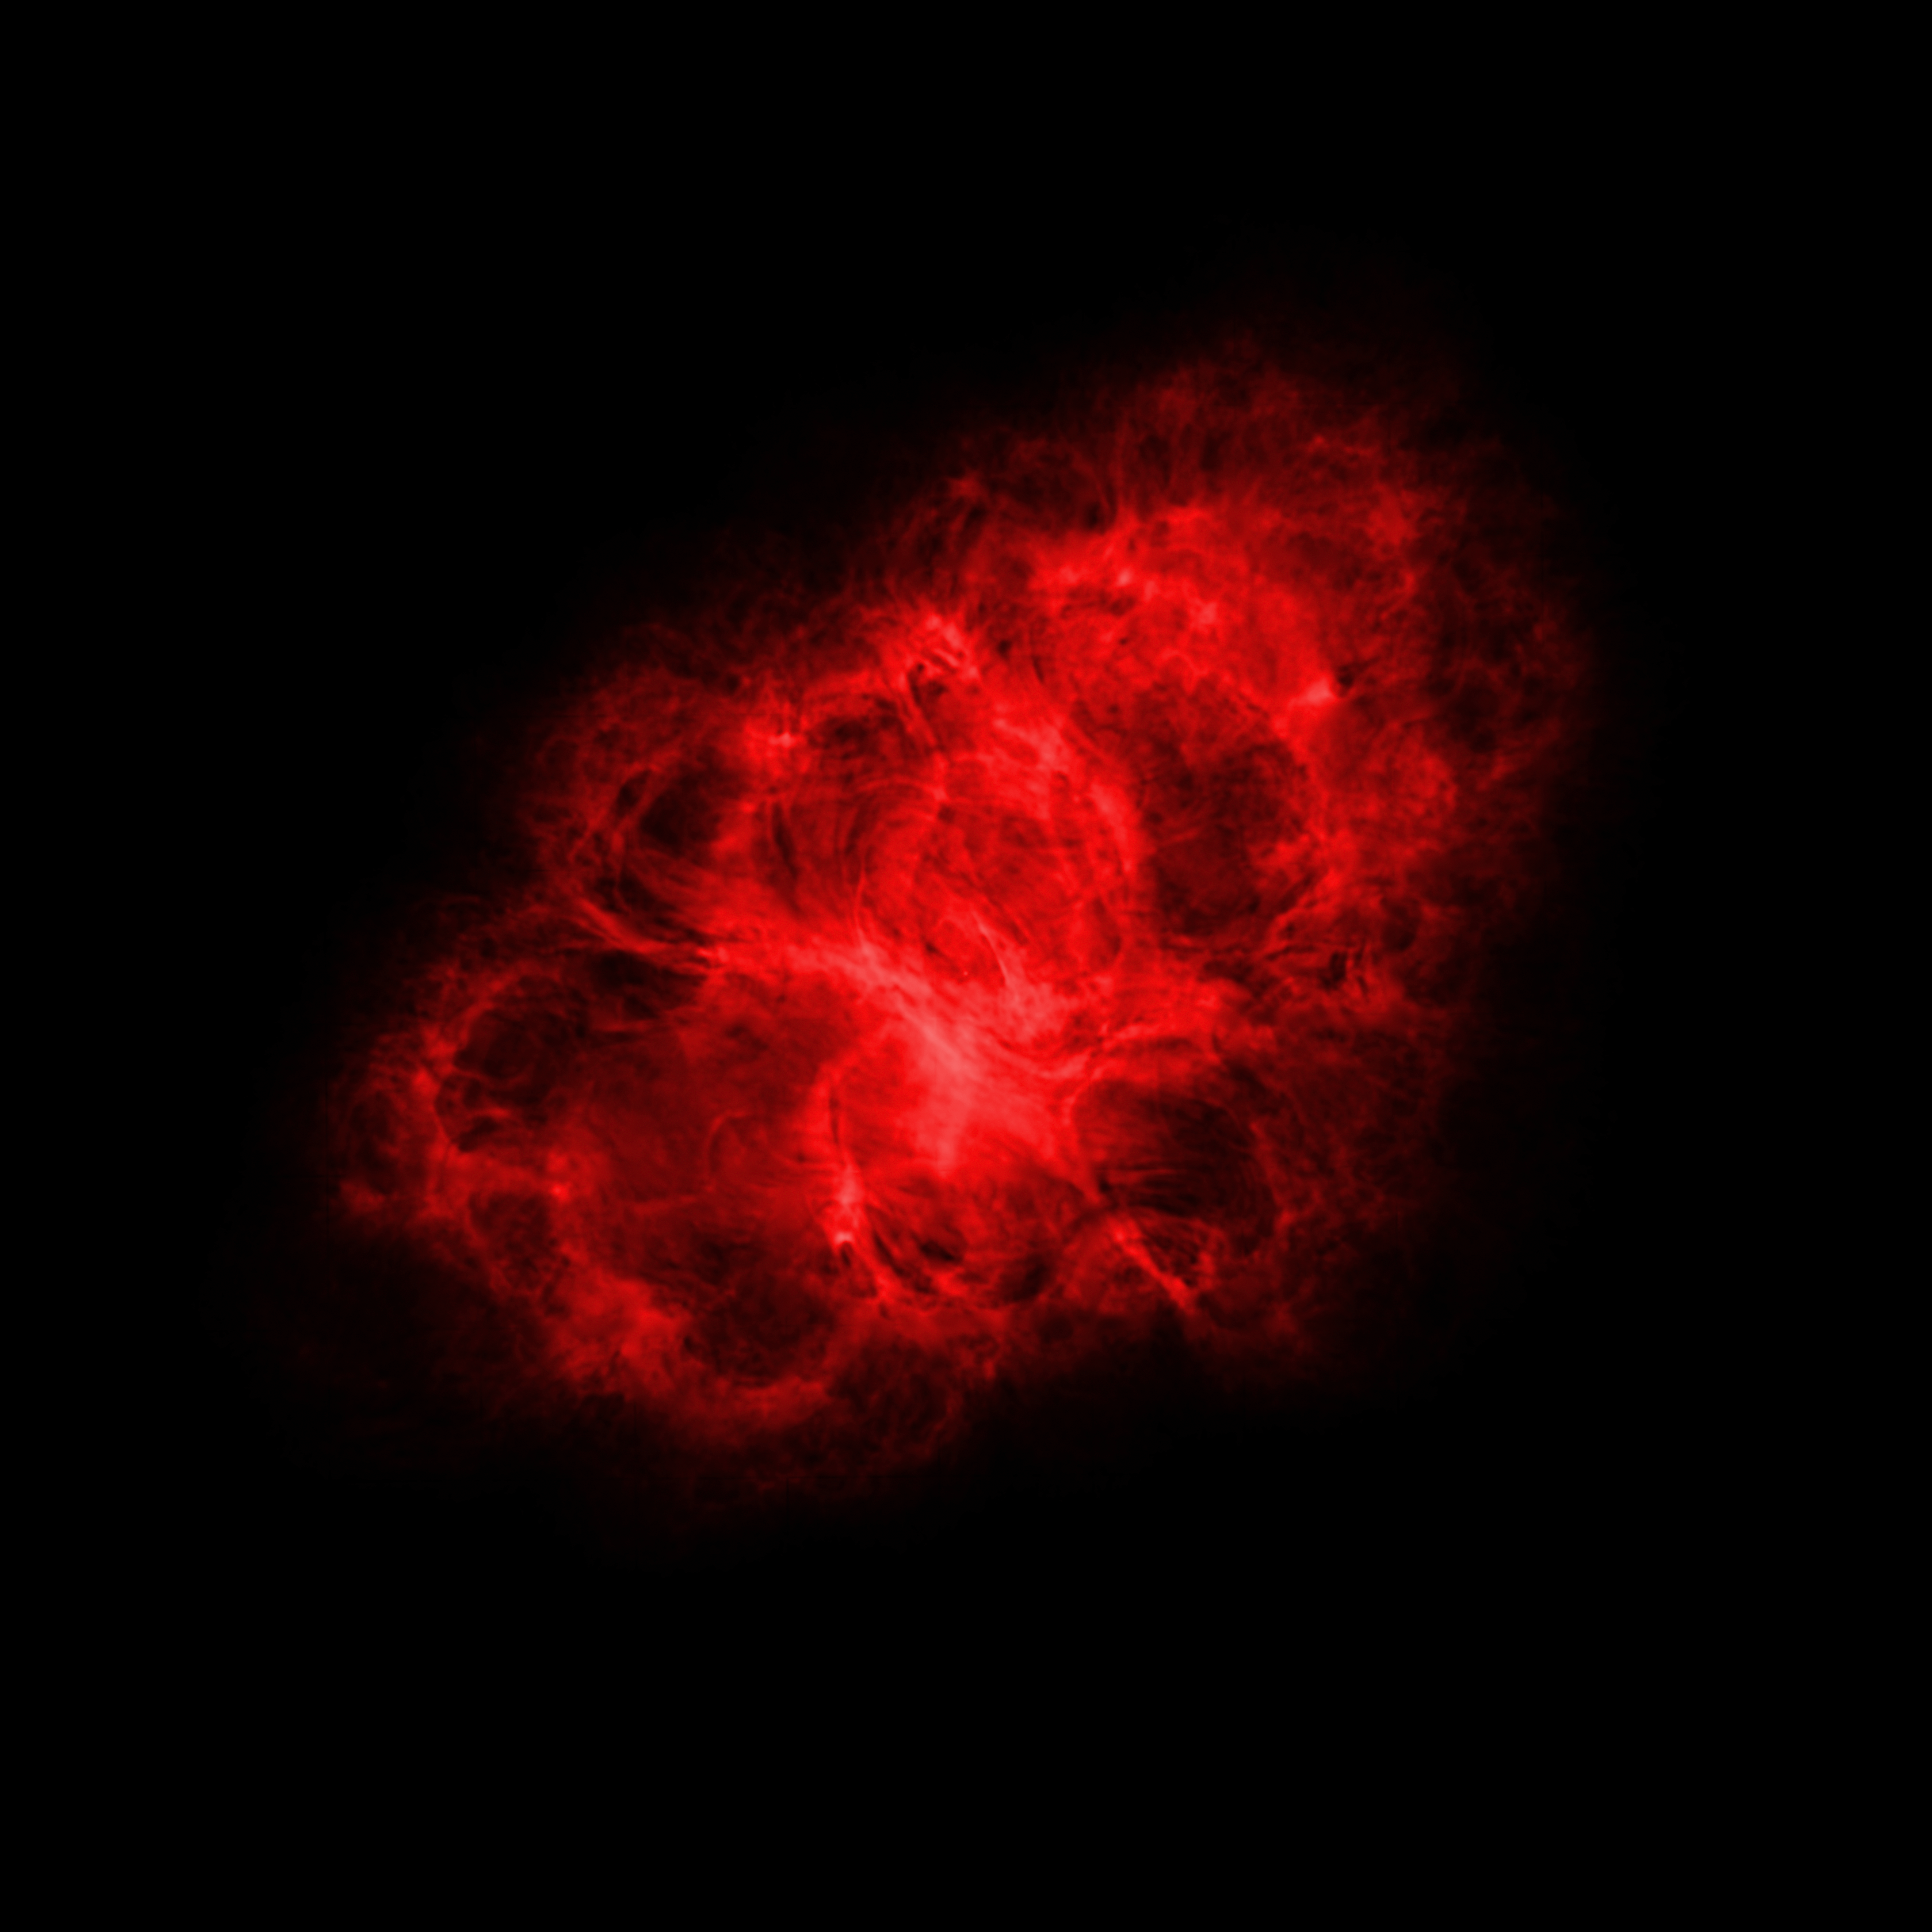

Very Large Array (radio) Image of the Crab Nebula

The Karl G. Jansky Very Large Array (VLA) observed the Crab Nebula, a supernova remnant located 6500 light-years from Earth, at radio wavelengths.

Credit: NRAO/AUI/NSF